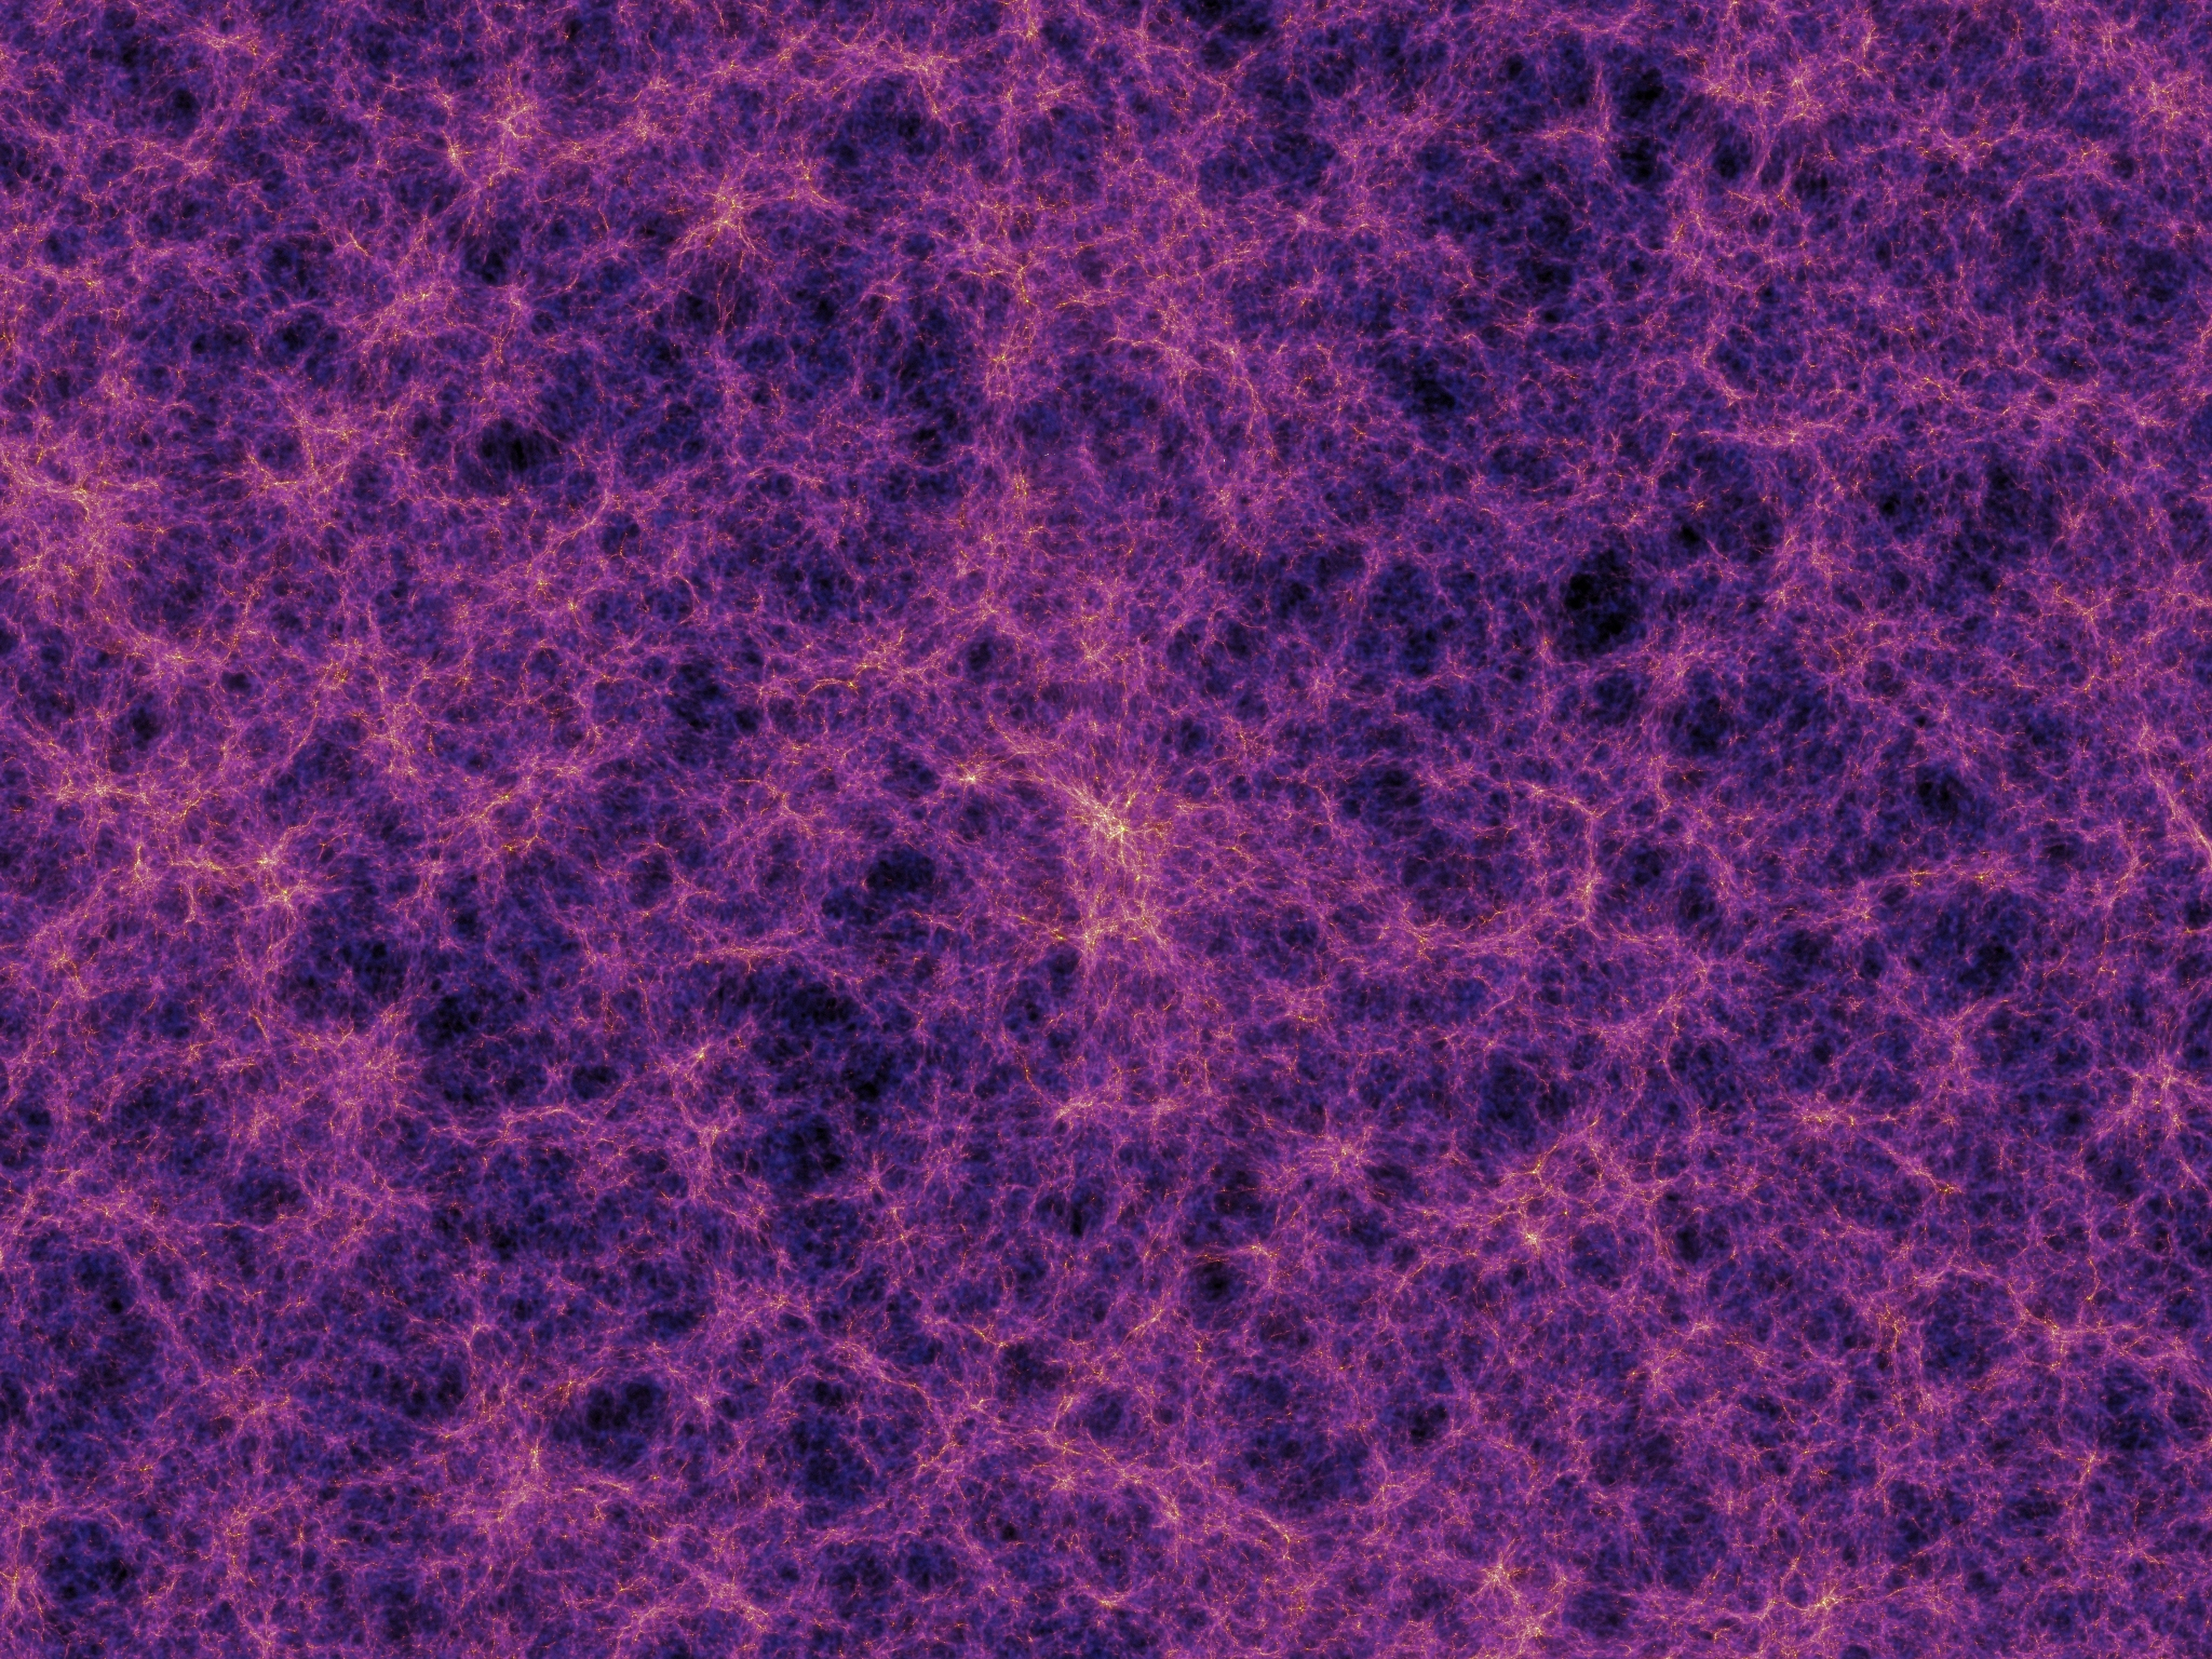

The Cosmic Web (Artist’s Impression)

In shaping the Universe, gravity builds a vast cobweb-like structure of filaments tying galaxies and clusters of galaxies together along invisible bridges hundreds of millions of light-years long. This is known as the cosmic web.

Credit: Volker Springel (Max Planck Institute for Astrophysics) et al.